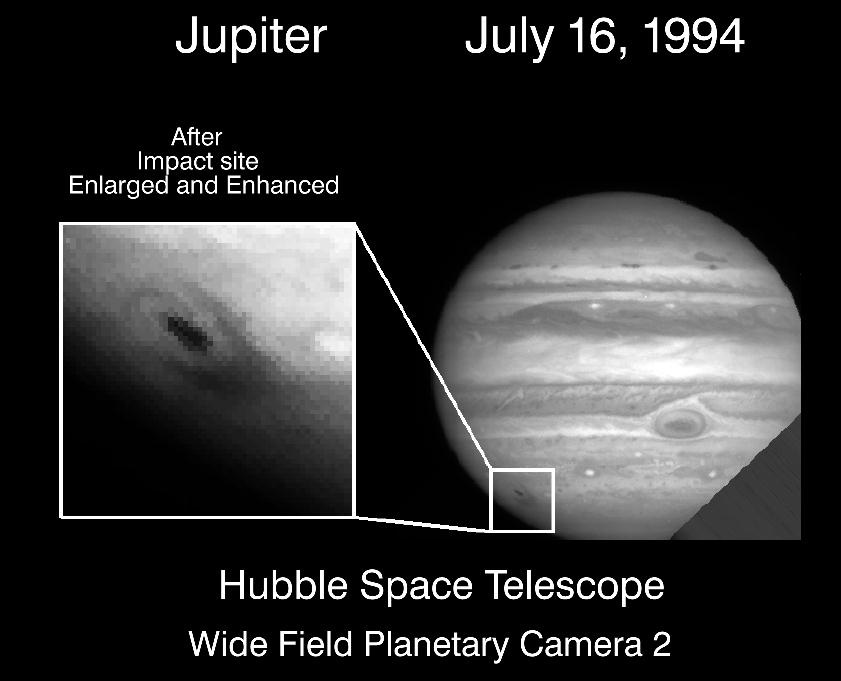

Hubble image of comet Shoemaker-Levy first fragment impact with Jupiter

This NASA/ESA Hubble Space Telescope image of Jupiter's cloudtops was taken at 5:32 EDT on July 16, 1994, shortly after the impact of the first fragment (A) of comet Shoemaker-Levy 9. A violet (410 nanometer) filter of the Wide Field Planetary Camera 2 was used to make the image 1.5 hours after the impact.

The impact site is visible as a dark streak and crescent-shaped feature in the lower left of the image, and is several thousand kilometers across. The comet entered the atmosphere from the south in the direction of the streak at an angle of about 45 degrees from the vertical. The crescent-shaped feature may be the remains of the plume that was ejected back along the entry path of the projectile. The features are probably dark particles from the comet, or possibly condensates dredged up from Jupiter's deep atmosphere.

Credit: H. Hammel, MIT and NASA/ESA